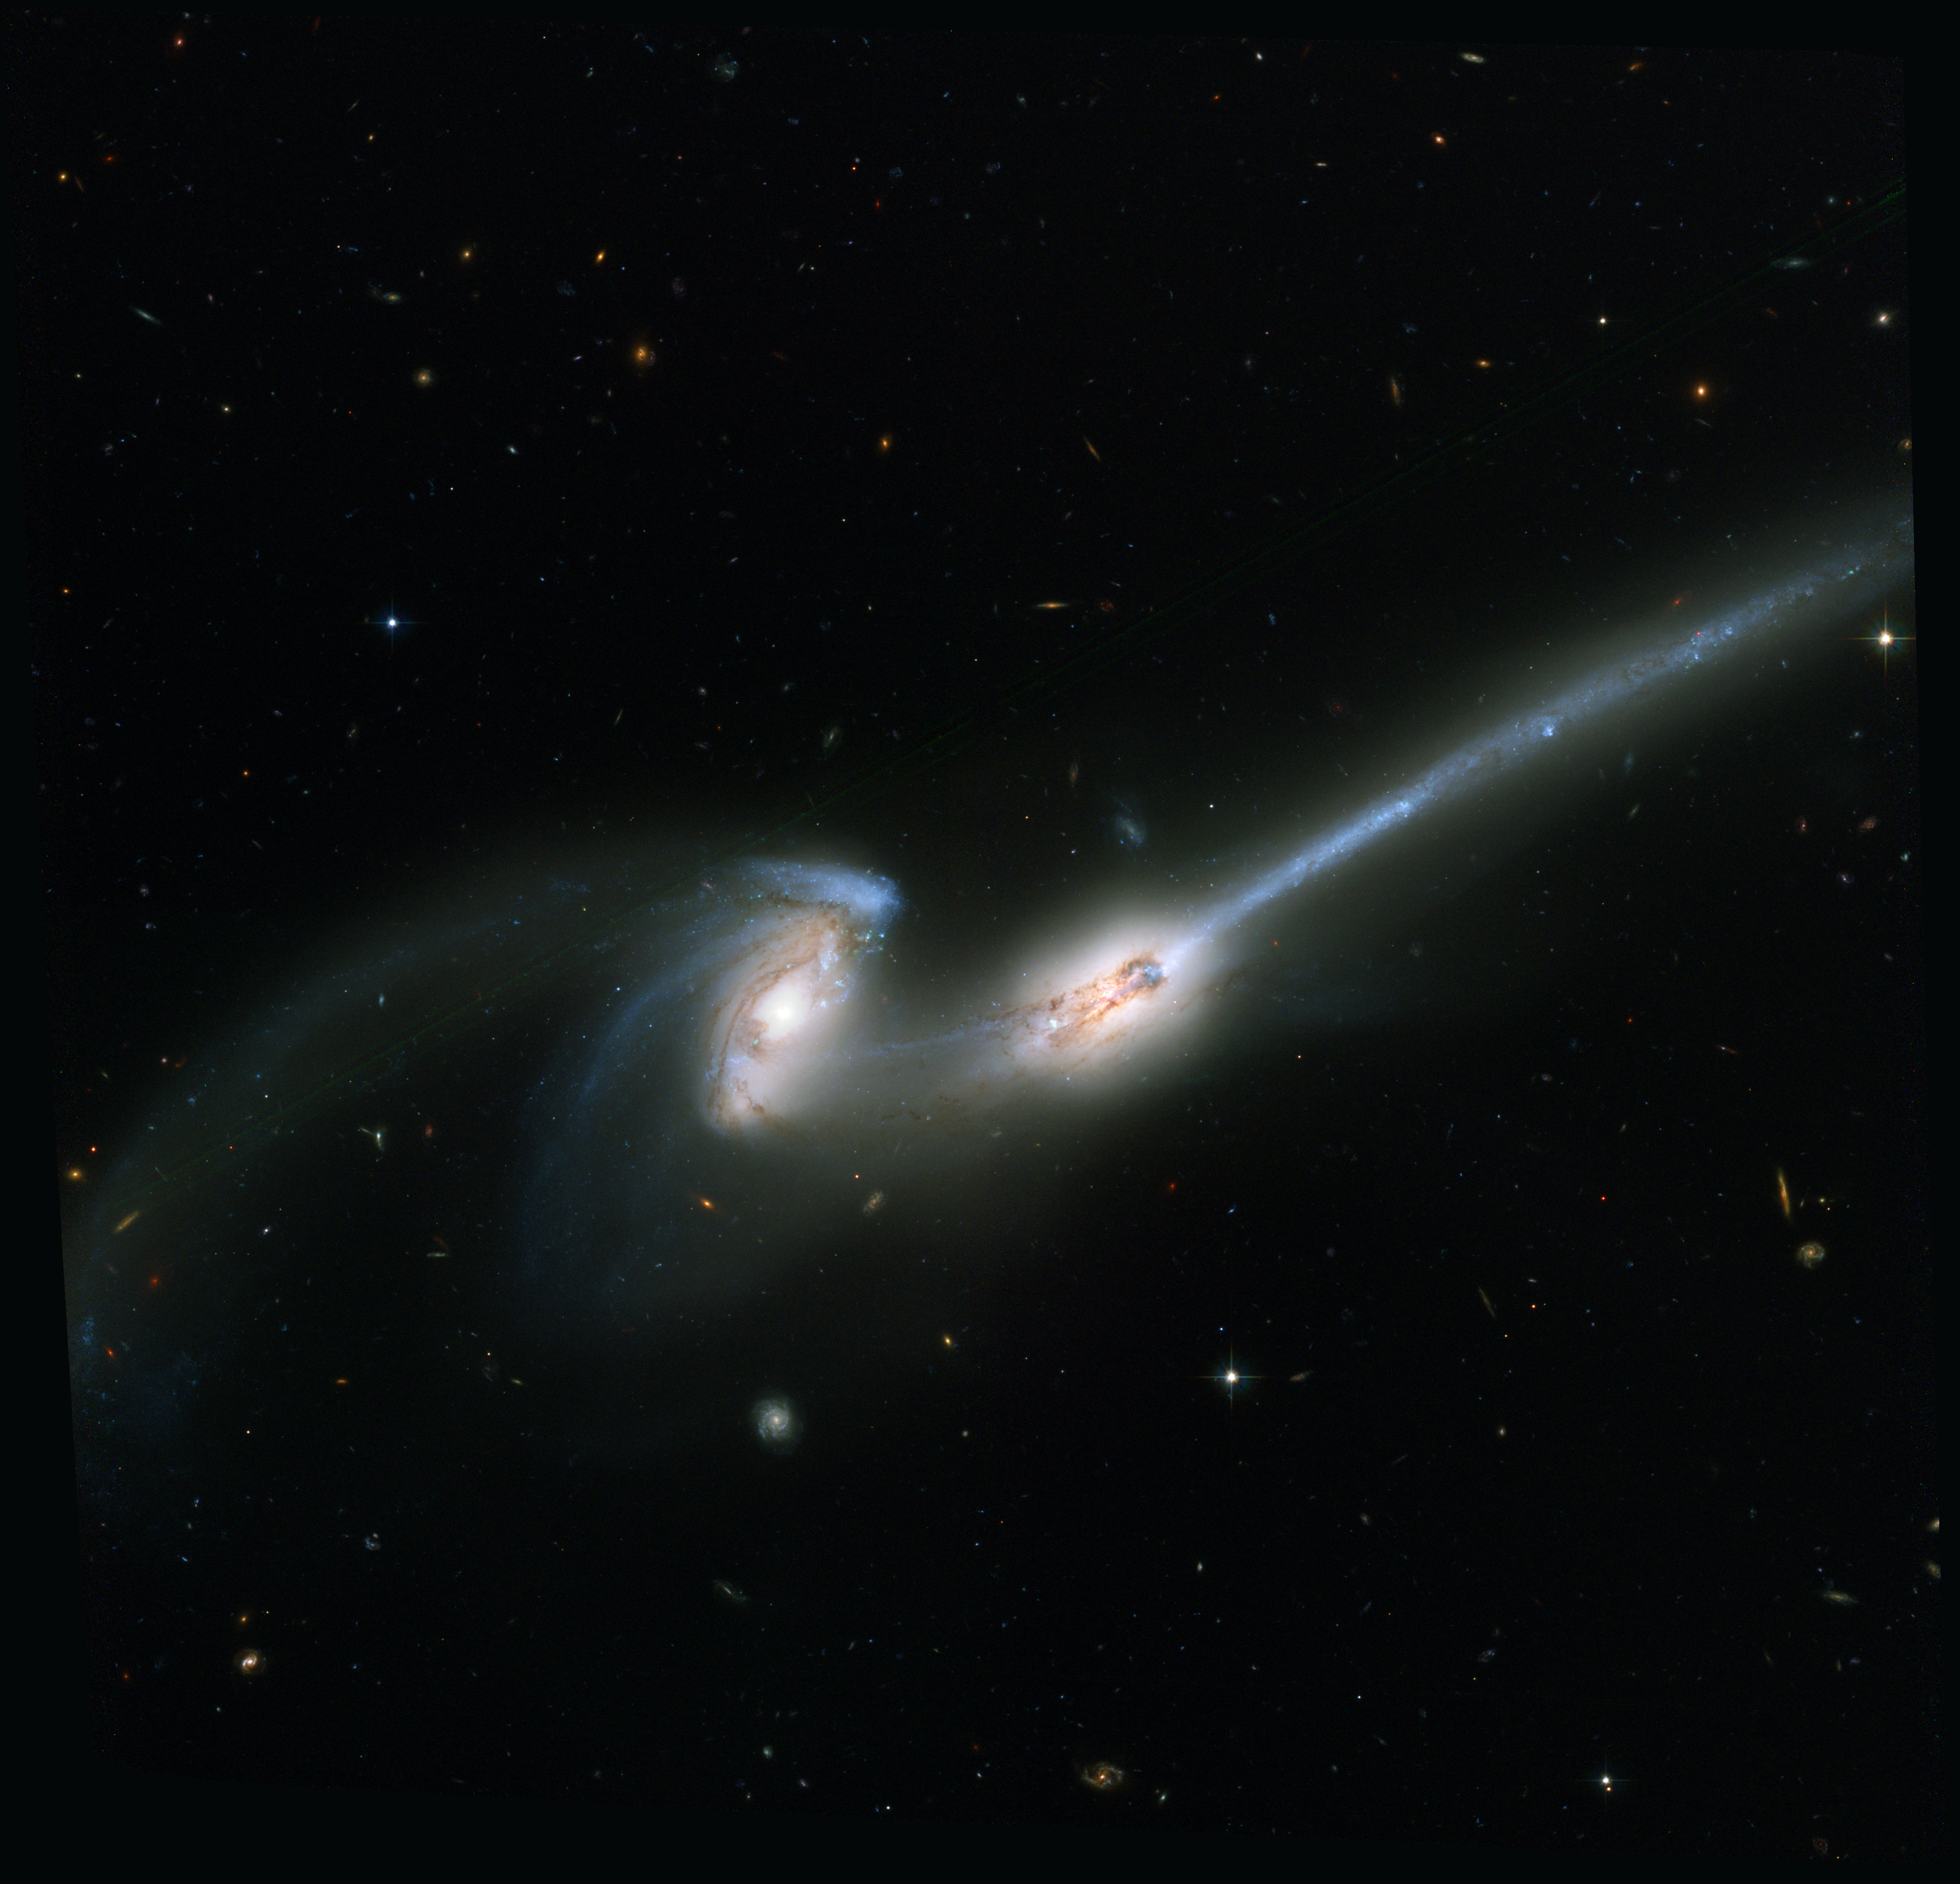

The Mice/NGC 4676 (ACS Full Field Image)

NASA's Hubble Space Telescope, has captured a spectacular pair of galaxies engaged in a celestial dance of cat and mouse or, in this case, mouse and mouse. Located 300 million light-years away in the constellation Coma Berenices, the colliding galaxies have been nicknamed "The Mice" because of the long tails of stars and gas emanating from each galaxy. Otherwise known as NGC 4676, the pair will eventually merge into a single giant galaxy. The Hubble image shows the most detail and the most stars that have ever been seen in these galaxies. In one galaxy a bright blue patch is resolved into a vigorous cascade of clusters and associations of young, hot blue stars, whose formation has been triggered by the tidal forces of the gravitational interaction. Streams of material can also be seen flowing between the two galaxies.

Credit: NASA, H. Ford (JHU), G. Illingworth (UCSC/LO), M.Clampin (STScI), G. Hartig (STScI), the ACS Science Team, and ESAThe ACS Science Team: H. Ford, G. Illingworth, M. Clampin, G. Hartig, T. Allen, K. Anderson, F. Bartko, N. Benitez, J. Blakeslee, R. Bouwens, T. Broadhurst, R. Brown, C. Burrows, D. Campbell, E. Cheng, N. Cross, P. Feldman, M. Franx, D. Golimowski, C. Gronwall, R. Kimble, J. Krist, M. Lesser, D. Magee, A. Martel, W. J. McCann, G. Meurer, G. Miley, M. Postman, P. Rosati, M. Sirianni, W. Sparks, P. Sullivan, H. Tran, Z. Tsvetanov, R. White, and R. Woodruff.